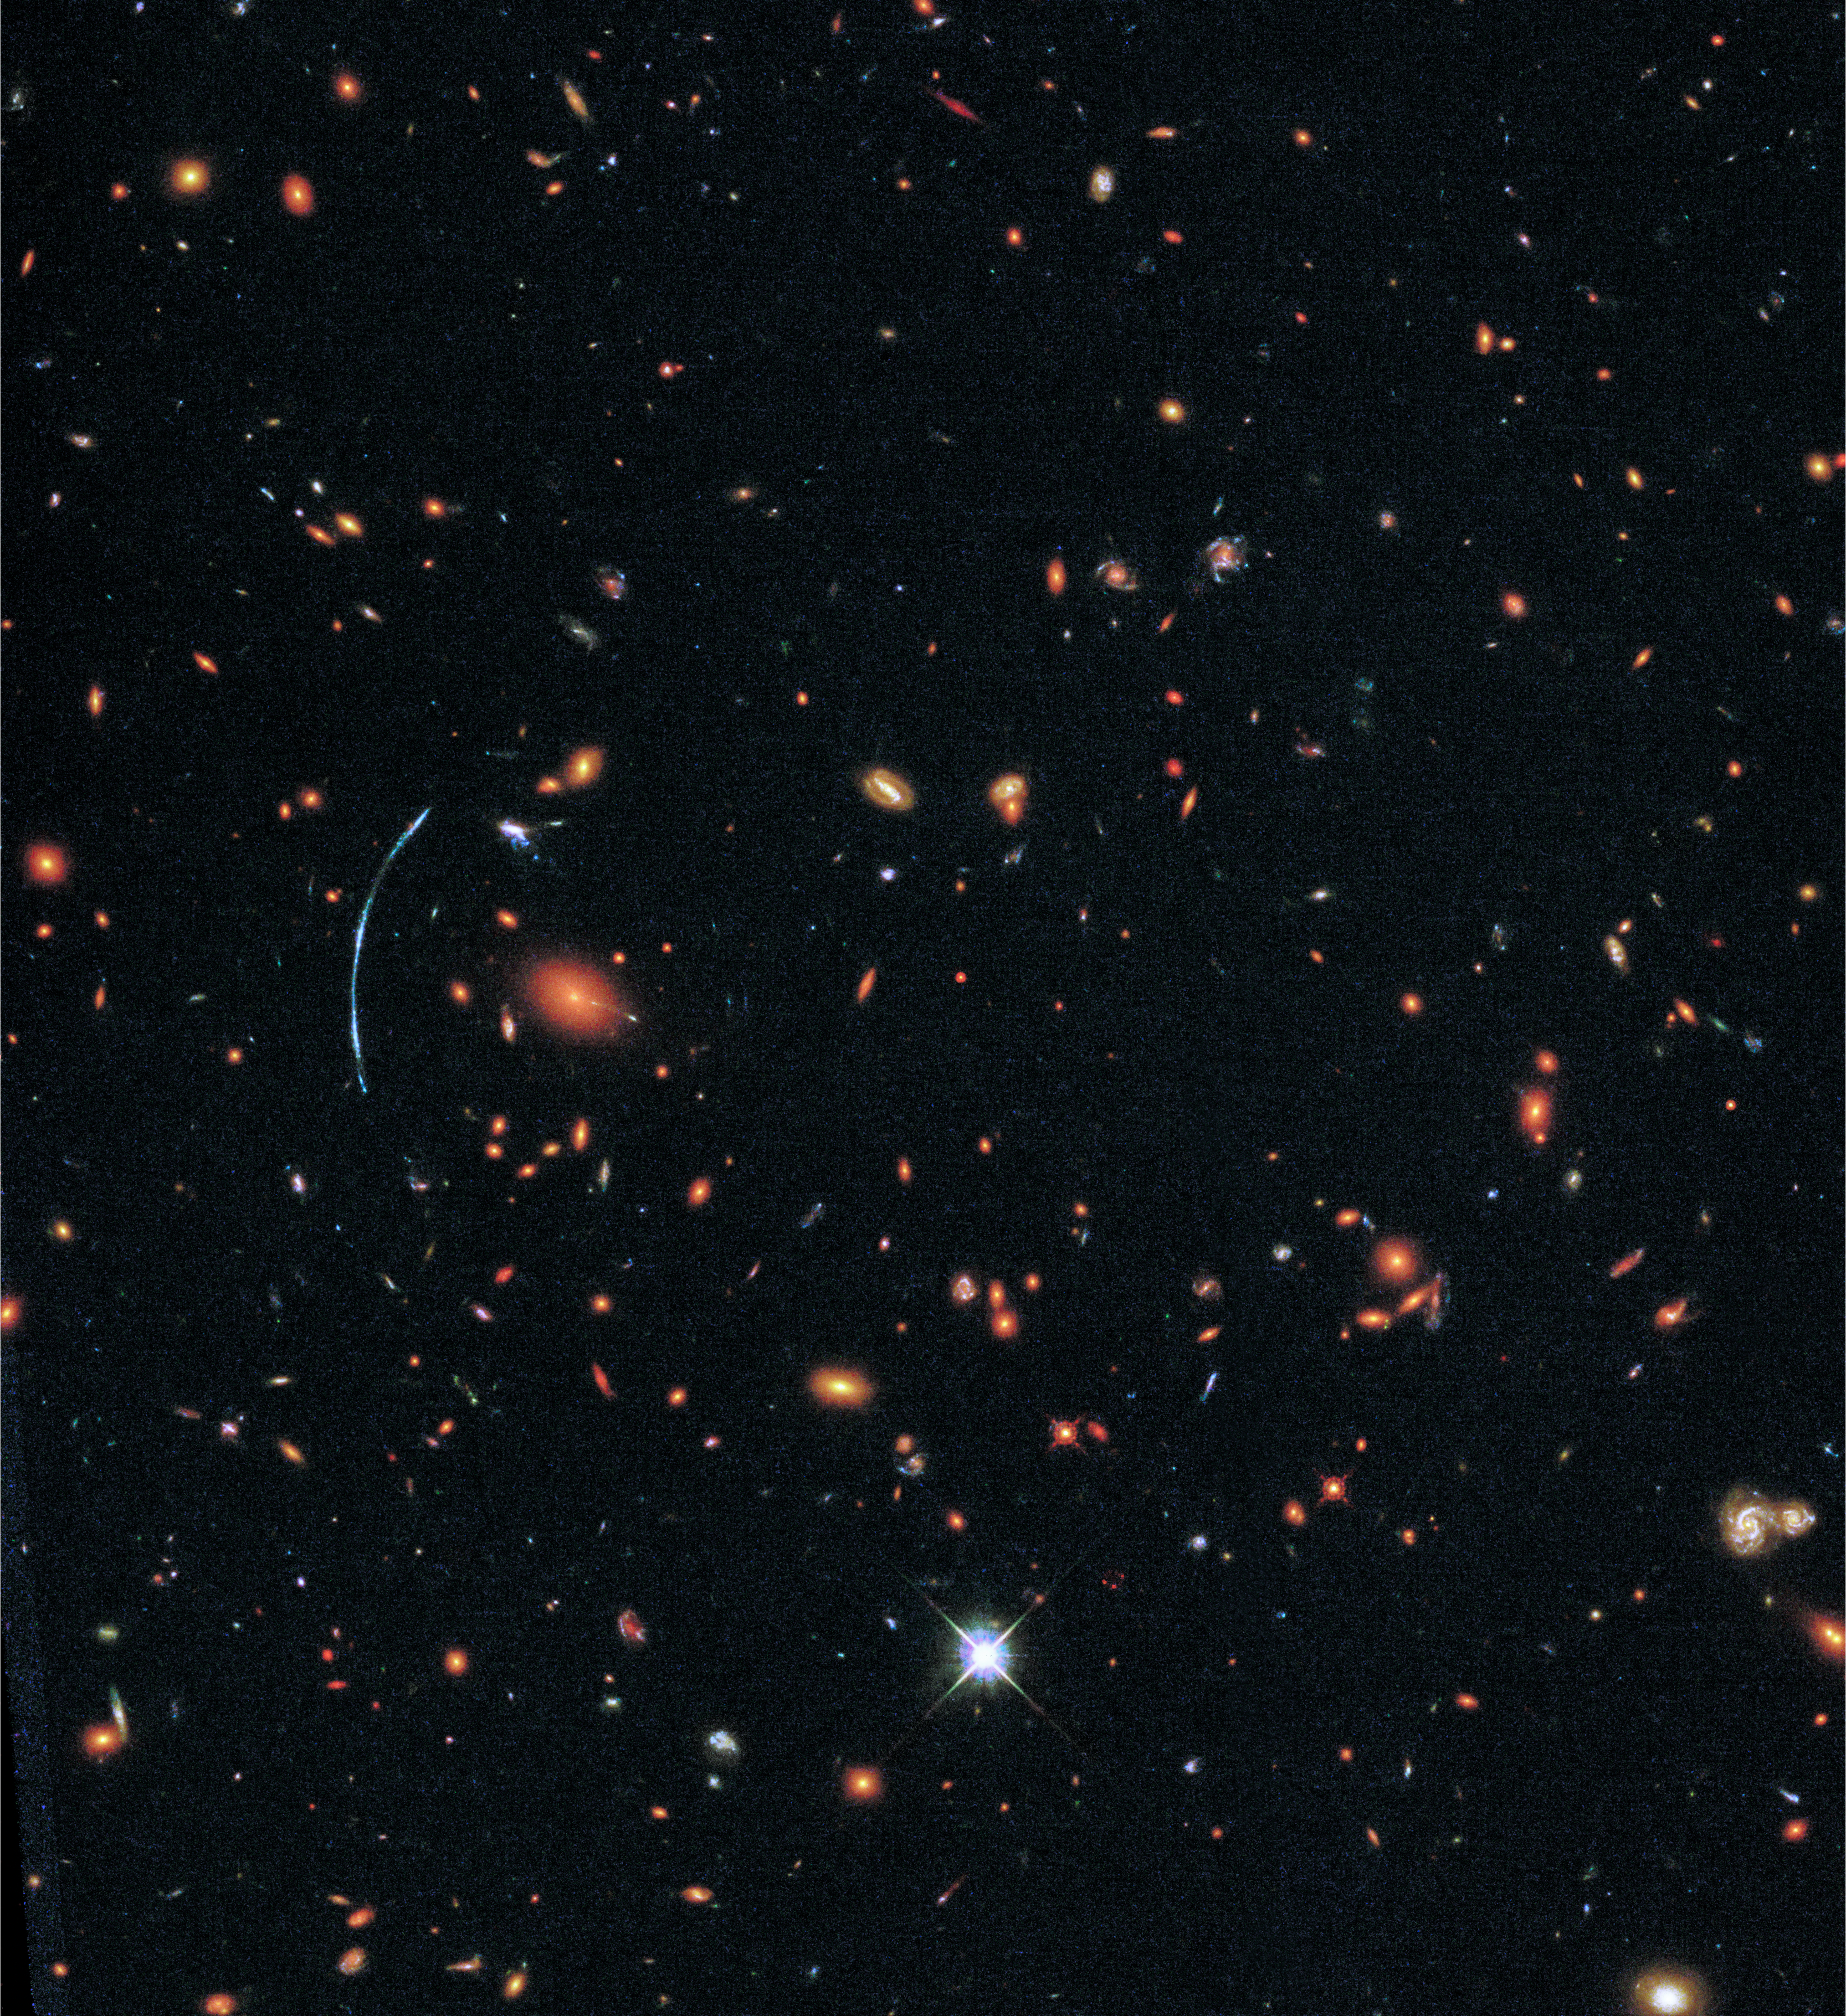

Wide field image of galaxy cluster SDSS J1110+6459

The galaxy cluster shown here, SDSS J1110+6459, was discovered as part of the Sloan Giant Arcs Survey. It is located about 6 billion light-years from Earth (redshift of z=0.659) and contains hundreds of galaxies. At left, a distinctive blue arc is actually composed of three separate images of a more distant background galaxy called SGAS J111020.0+645950.8. This background galaxy has been magnified, distorted, and multiply imaged by the gravity of the galaxy cluster in a process known as gravitational lensing.

Credit: NASA, ESA, and T. Johnson (University of Michigan)